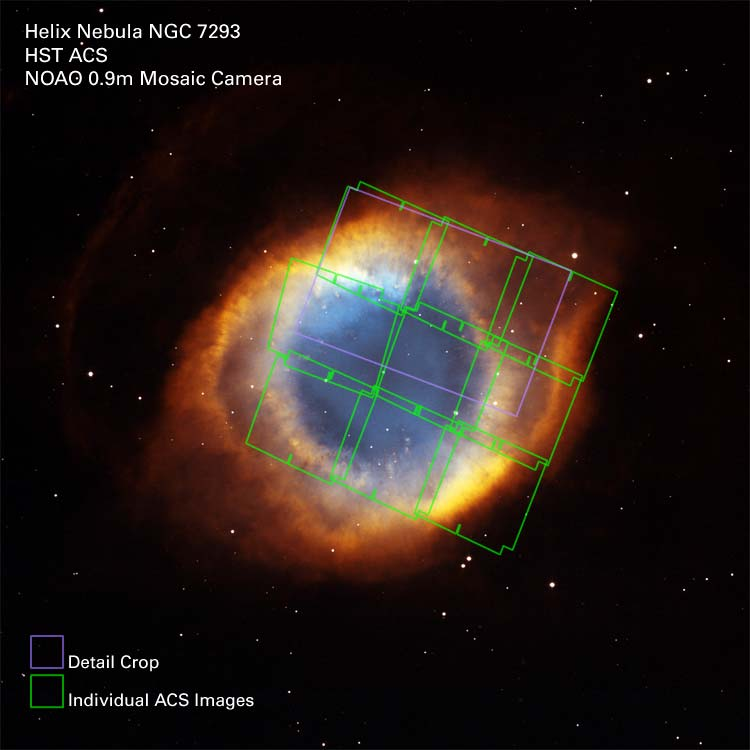

Helix Nebula ACS Exposures on Full Image

Location of detail and ACS exposures on a full image of the Helix Nebula.

Credit: NASA, NOAO, ESA and The Hubble Helix Nebula Team